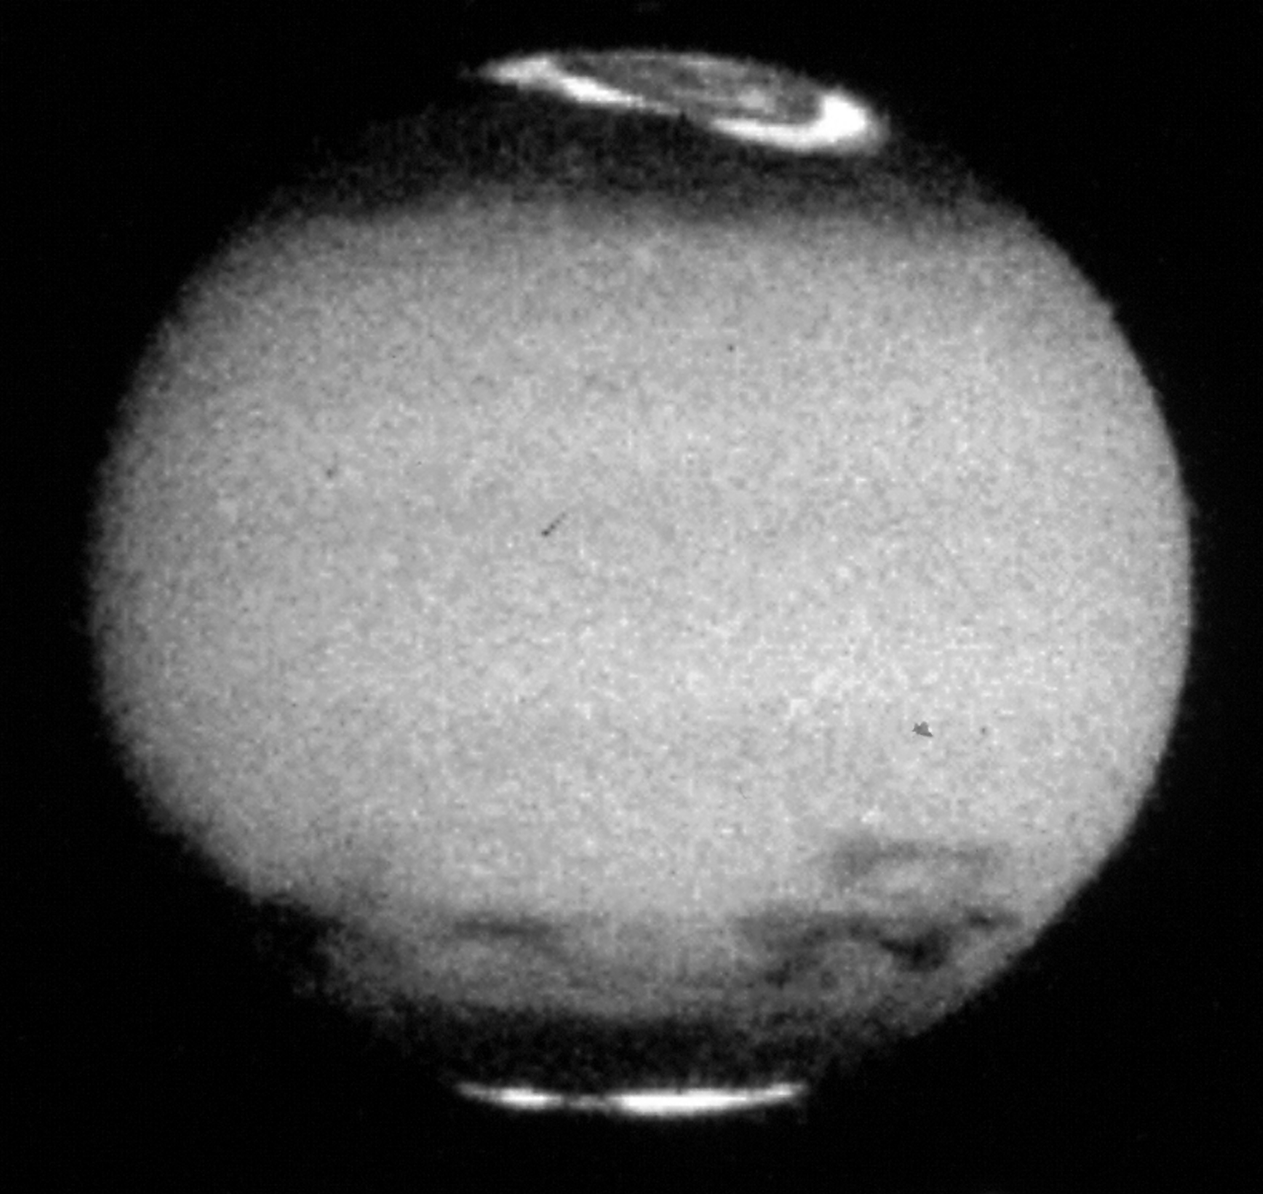

Jupiter Comet Impact

This image of Jupiter shows the remarkable spreading of the clouds of smoke and dust thrown into the atmosphere after the impacts of the fragments of comet P/Shoemaker-Levy 9. These dark regions provide the only information ever obtained on the wind direction and speed in Jupiter's upper atmosphere.

Credit: NASA & ESA